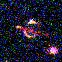

Hubble's Top Ten Gravitational Lenses. A View of HST 16302+8230

HST 16302+8230 could be an 'Einstein ring' and the most intriguing lens candidate. It has been nicknamed the 'the London Underground' since it resembles that logo.

Credit: Kavan Ratnatunga (Carnegie Mellon Univ.) and NASA/ESA